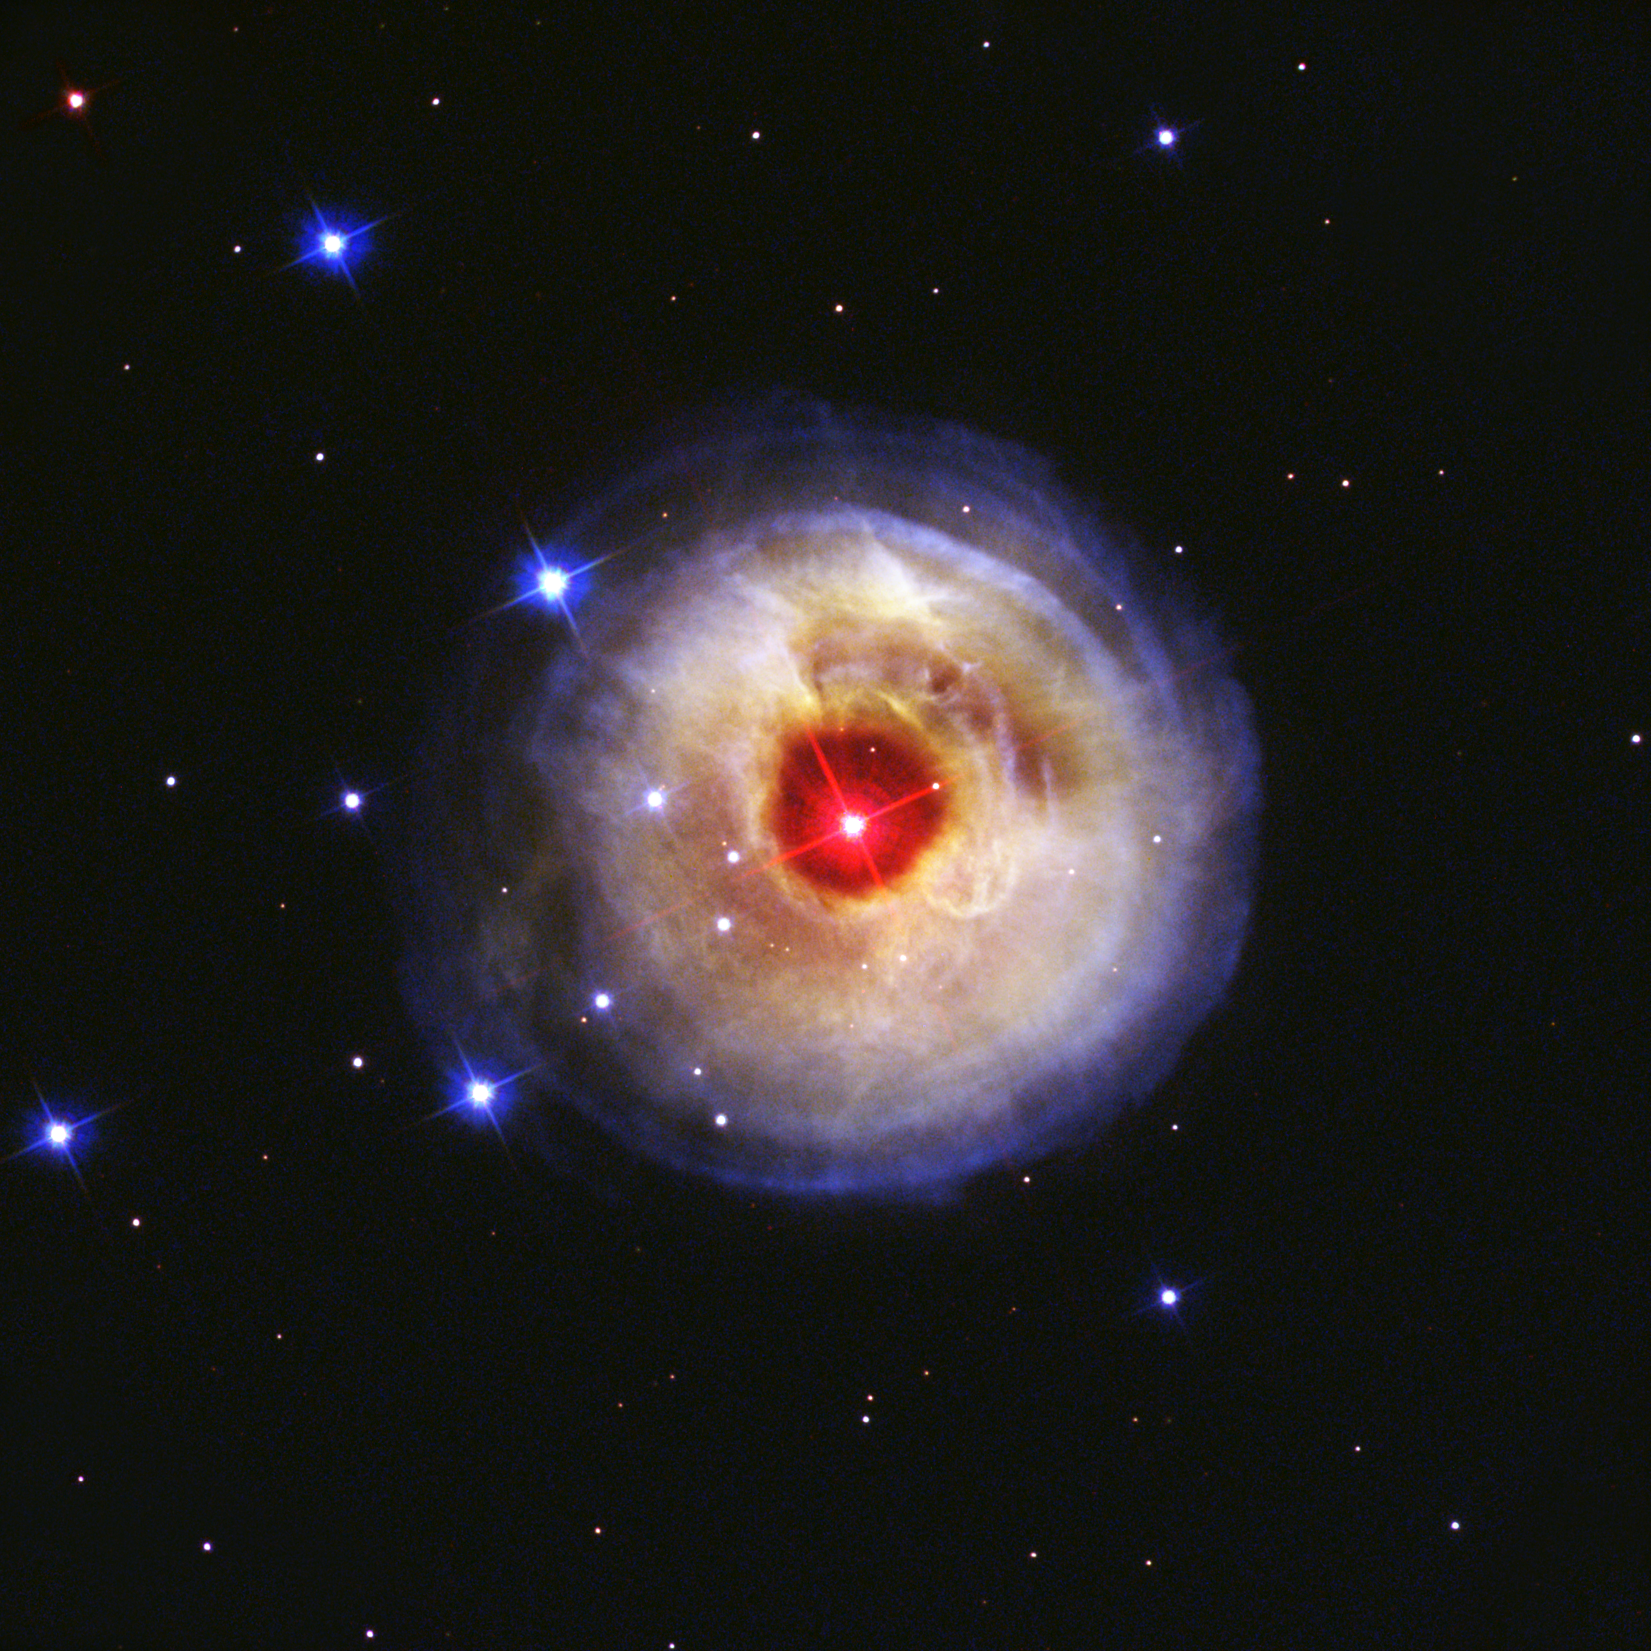

Hubble watches light echo from mysterious erupting star (May 2002 image)

This is the first in a sequence of four pictures from the NASA/ESA Hubble Space Telescope's Advanced Camera for Surveys that dramatically demonstrates the echoing of light through space caused by an unusal stellar outburst in January 2002.

The image was taken on 20 May 2002. The image is combined from exposures taken through blue (B), green (V), and infrared (I) filters.

Credit: NASA, European Space Agency, and H.E. Bond (STScI)